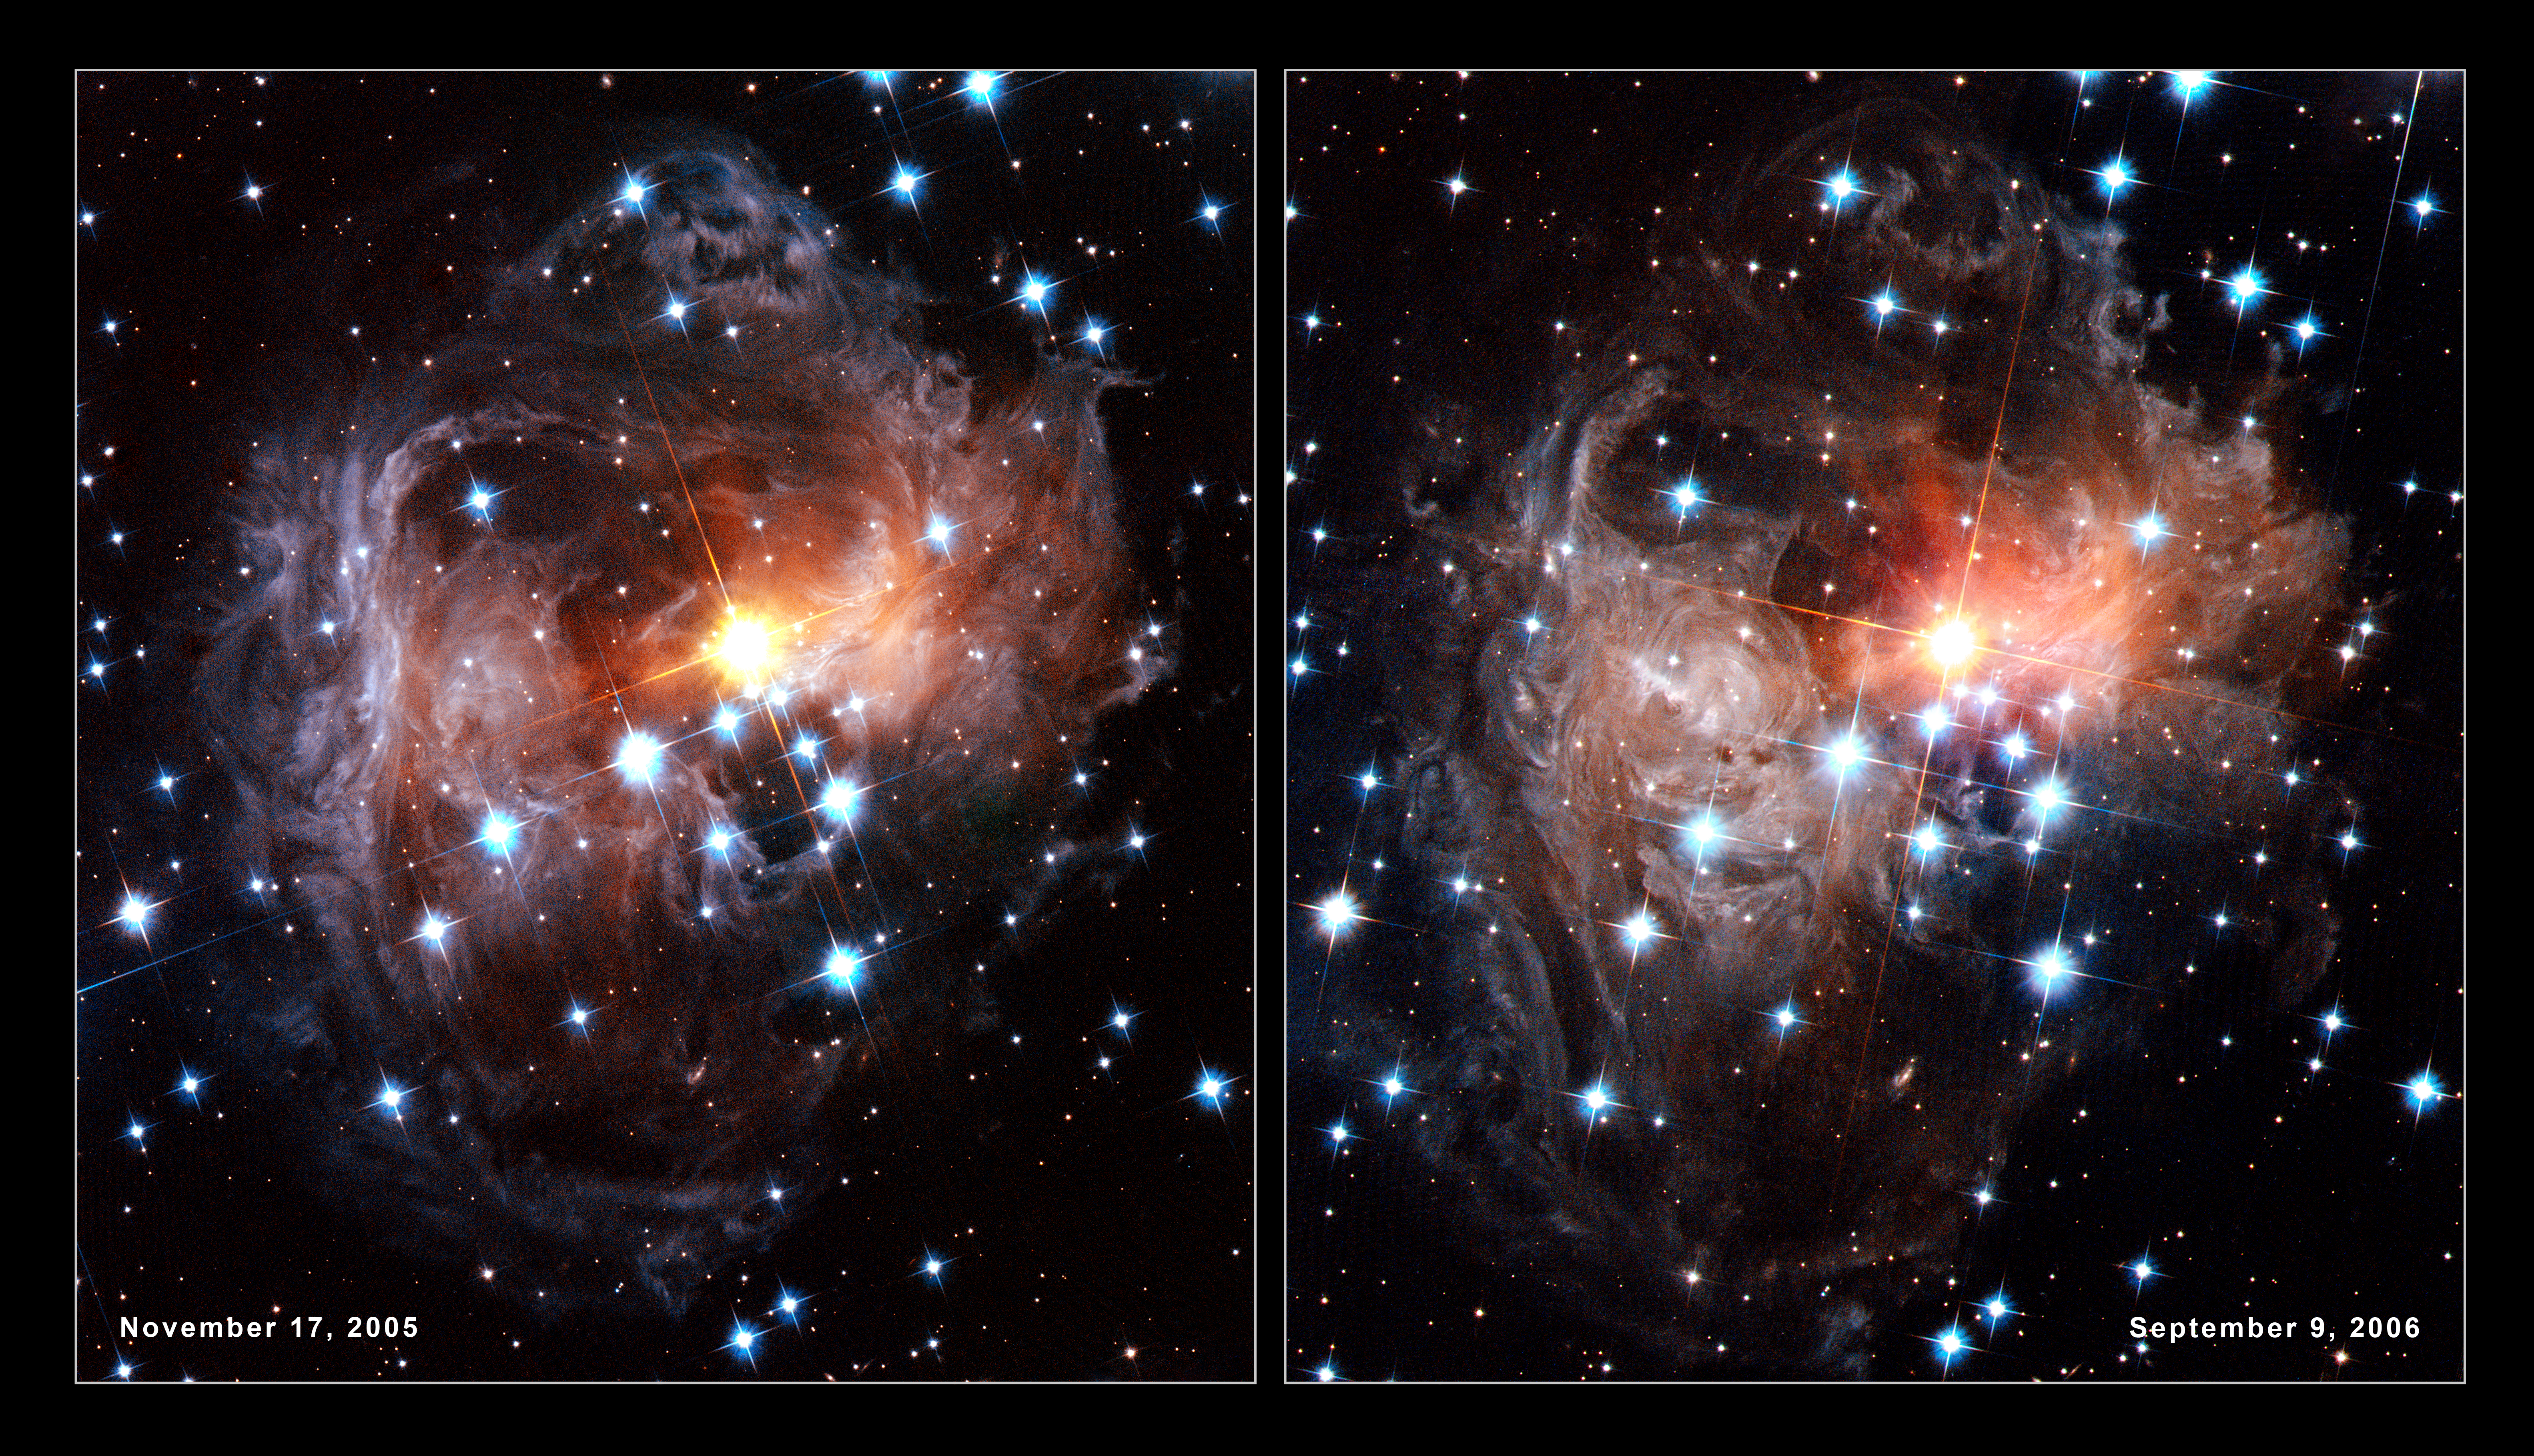

Spectacular views of V838 Monocerotis light echo

These images show the evolution of the light echo around the star V838 in the constellation of Monoceros. They were taken by the Hubble Advanced Camera for Surveys in November 2005 (left) and again in September 2006 (right). The numerous whorls and eddies in the interstellar dust are particularly noticeable. Possibly they have been produced by the effects of magnetic fields in the space between the stars.

Credit: NASA, ESA and H. Bond (STScI)